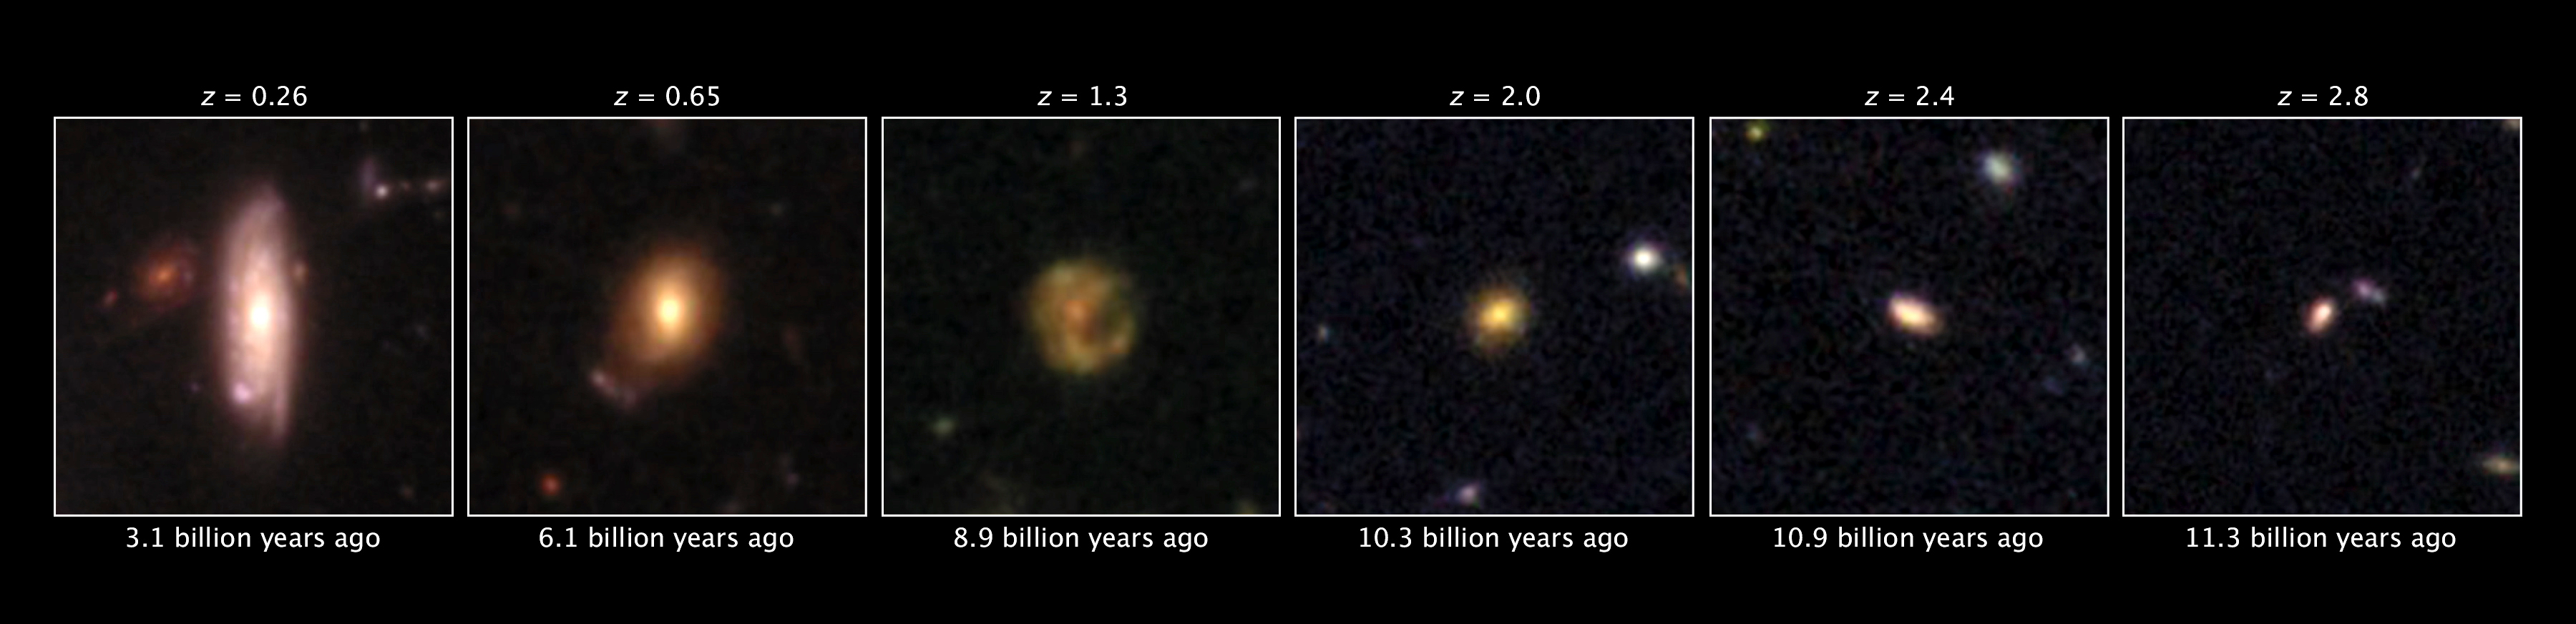

The growth of Milky Way-like galaxies over time

These six snapshots taken by the NASA/ESA Hubble Space Telescope show how galaxies similar in mass to our home galaxy, the Milky Way, evolved over time.

The images reveal that Milky Way-like galaxies grow larger in size and in stellar mass over billions of years. The image at the far right reveals a compact, youthful galaxy as it looked 11.3 billion years ago, when our Universe was only about 2.5 billion years old. The bluish-white glow reveals that the fledgling galaxy is undergoing a wave of star birth, as its rich reservoir of gas compresses under gravity, creating myriad stars. At 10.3 billion years ago (centre image), the firestorm of star birth is reaching its peak. The stellar "baby boom" churned out stars 30 times faster than the Milky Way does today. The galaxy's yellowish colour most likely highlights ongoing star formation that is being obscured by dust and gas.

Eventually, the galaxies exhaust their star-making gas. The galaxy at 8.9 billion years ago has developed a spiral shape, and the oldest stars reside in its central region. Nearly 3 billion years later, a similar galaxy has grown even larger. The galaxy is dominated by mostly older stars, which can be seen in its reddish appearance.

These images are part of the most comprehensive multi-observatory galaxy surveys yet. Stretching back in time more than 10 billion years, the census contains nearly 2 000 snapshots of Milky Way-like galaxies.

The images were taken between 2010 and 2012 with Hubble's Wide Field Camera 3 and Advanced Camera for Surveys as part of the Cosmic Assembly Near-infrared Deep Extragalactic Legacy Survey (CANDELS).

Credit: NASA, ESA, C. Papovich (Texas A&M University), H. Ferguson (STScI), S. Faber (University of California, Santa Cruz), and I. Labbé (Leiden University)